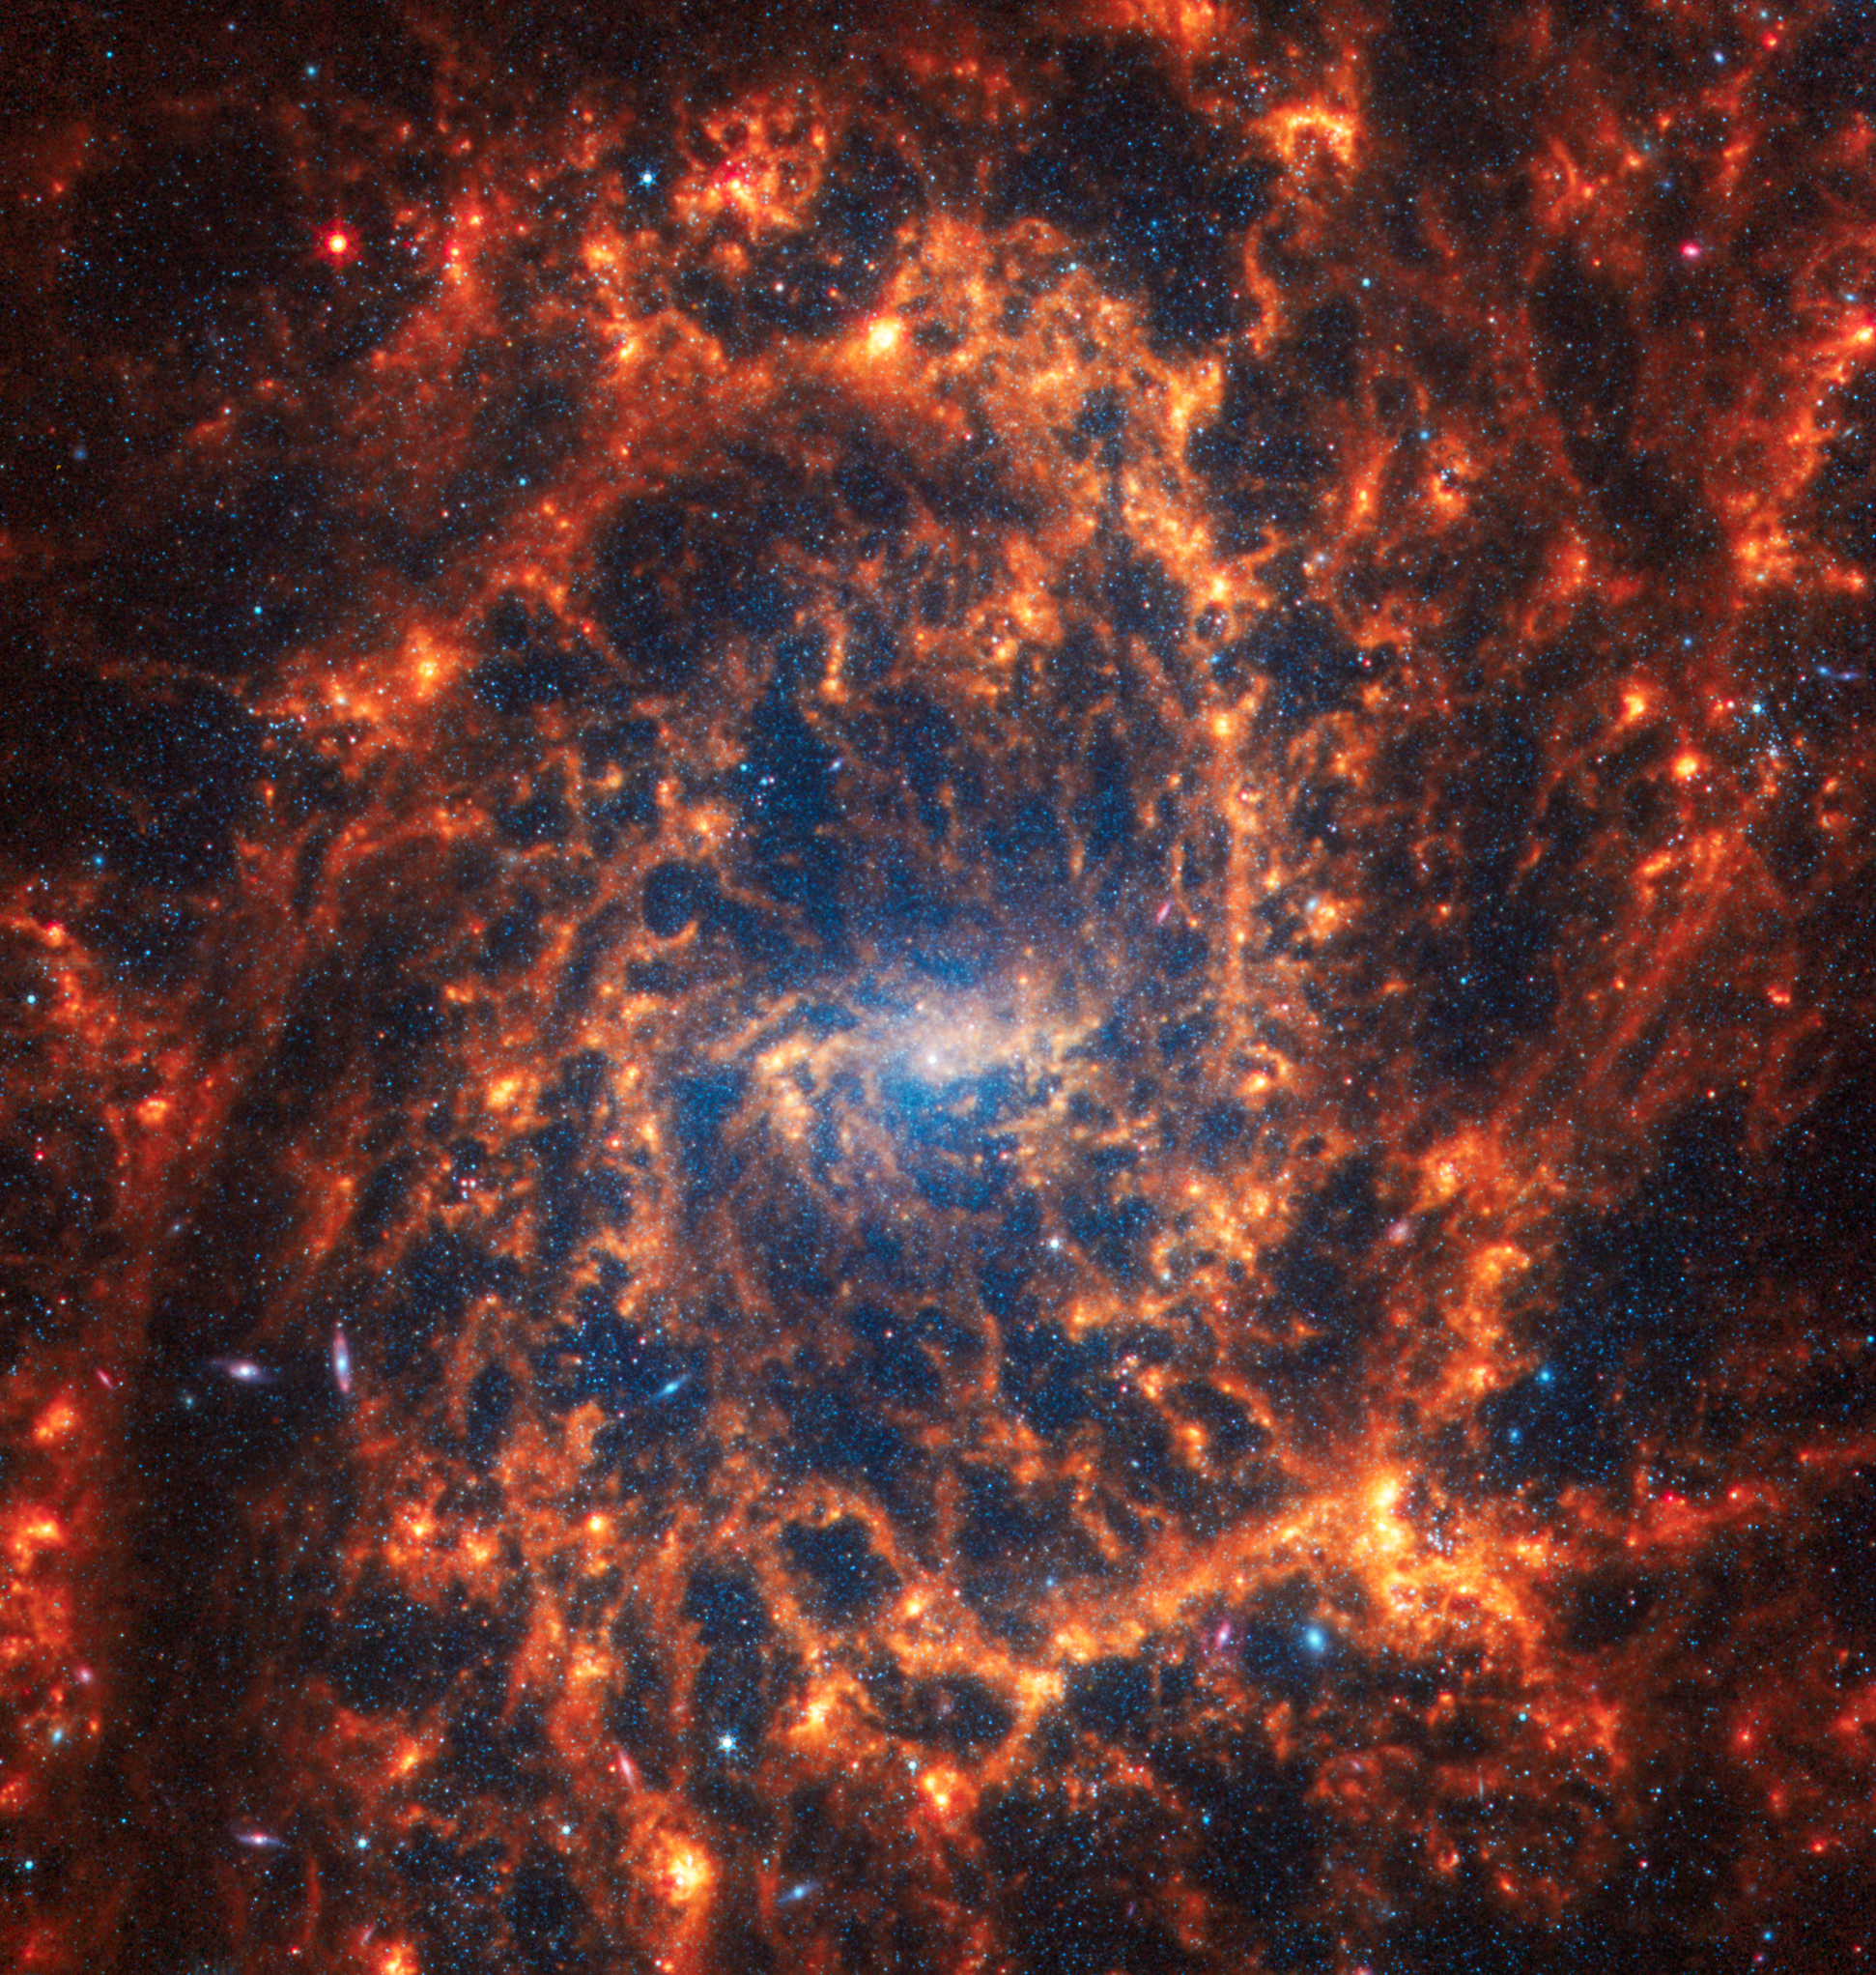

NGC 2835

This spiral galaxy was observed as part of the Physics at High Angular resolution in Nearby GalaxieS (PHANGS) program, a large project that includes observations from several space- and ground-based telescopes of many galaxies to help researchers study all phases of the star formation cycle, from the formation of stars within dusty gas clouds to the energy released in the process that creates the intricate structures revealed by Webb’s new images.

NGC 2835 is 35 million light-years away in the constellation Hydra.

Learn more about what can be seen in this vast collection of Webb images here.

Credit: NASA, ESA, CSA, STScI, J. Lee (STScI), T. Williams (Oxford), PHANGS Team